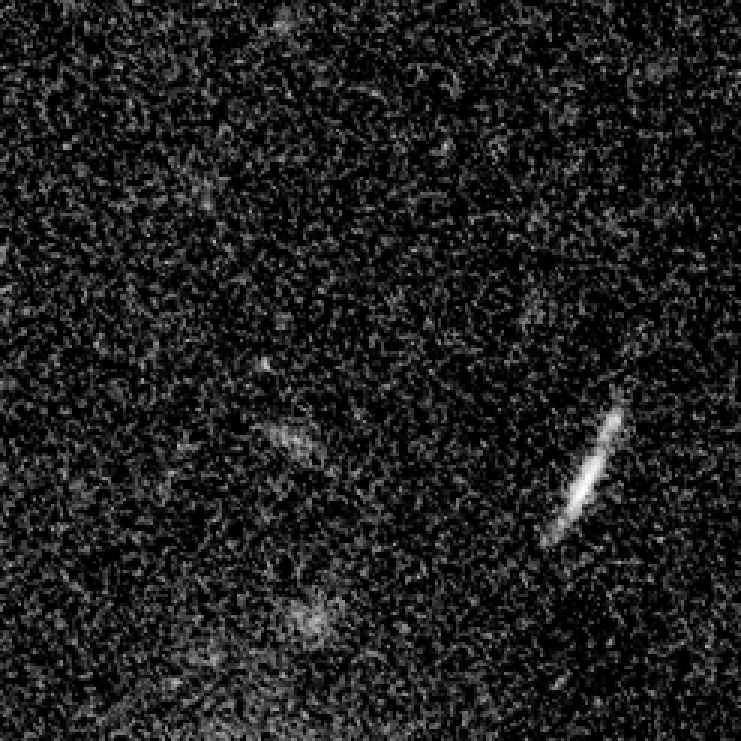

Arc in visible light (Hubble)

The gravity of the cluster's trillion stars acts as a cosmic "zoom lens", bending and magnifying the light of the galaxies located far behind it, a technique called gravitational lensing. The faraway galaxies appear in the Hubble image as arc-shaped objects around the cluster, named Abell 1689. The increased magnification allows astronomers to study remote galaxies in greater detail.

One galaxy is so far away, however, it does not show up in this visible-light image taken with Hubble's Advanced Camera for Surveys.

Credit: NASA; ESA; L. Bradley (Johns Hopkins University); R. Bouwens (University of California, Santa Cruz); H. Ford (Johns Hopkins University); and G. Illingworth (University of California, Santa Cruz)